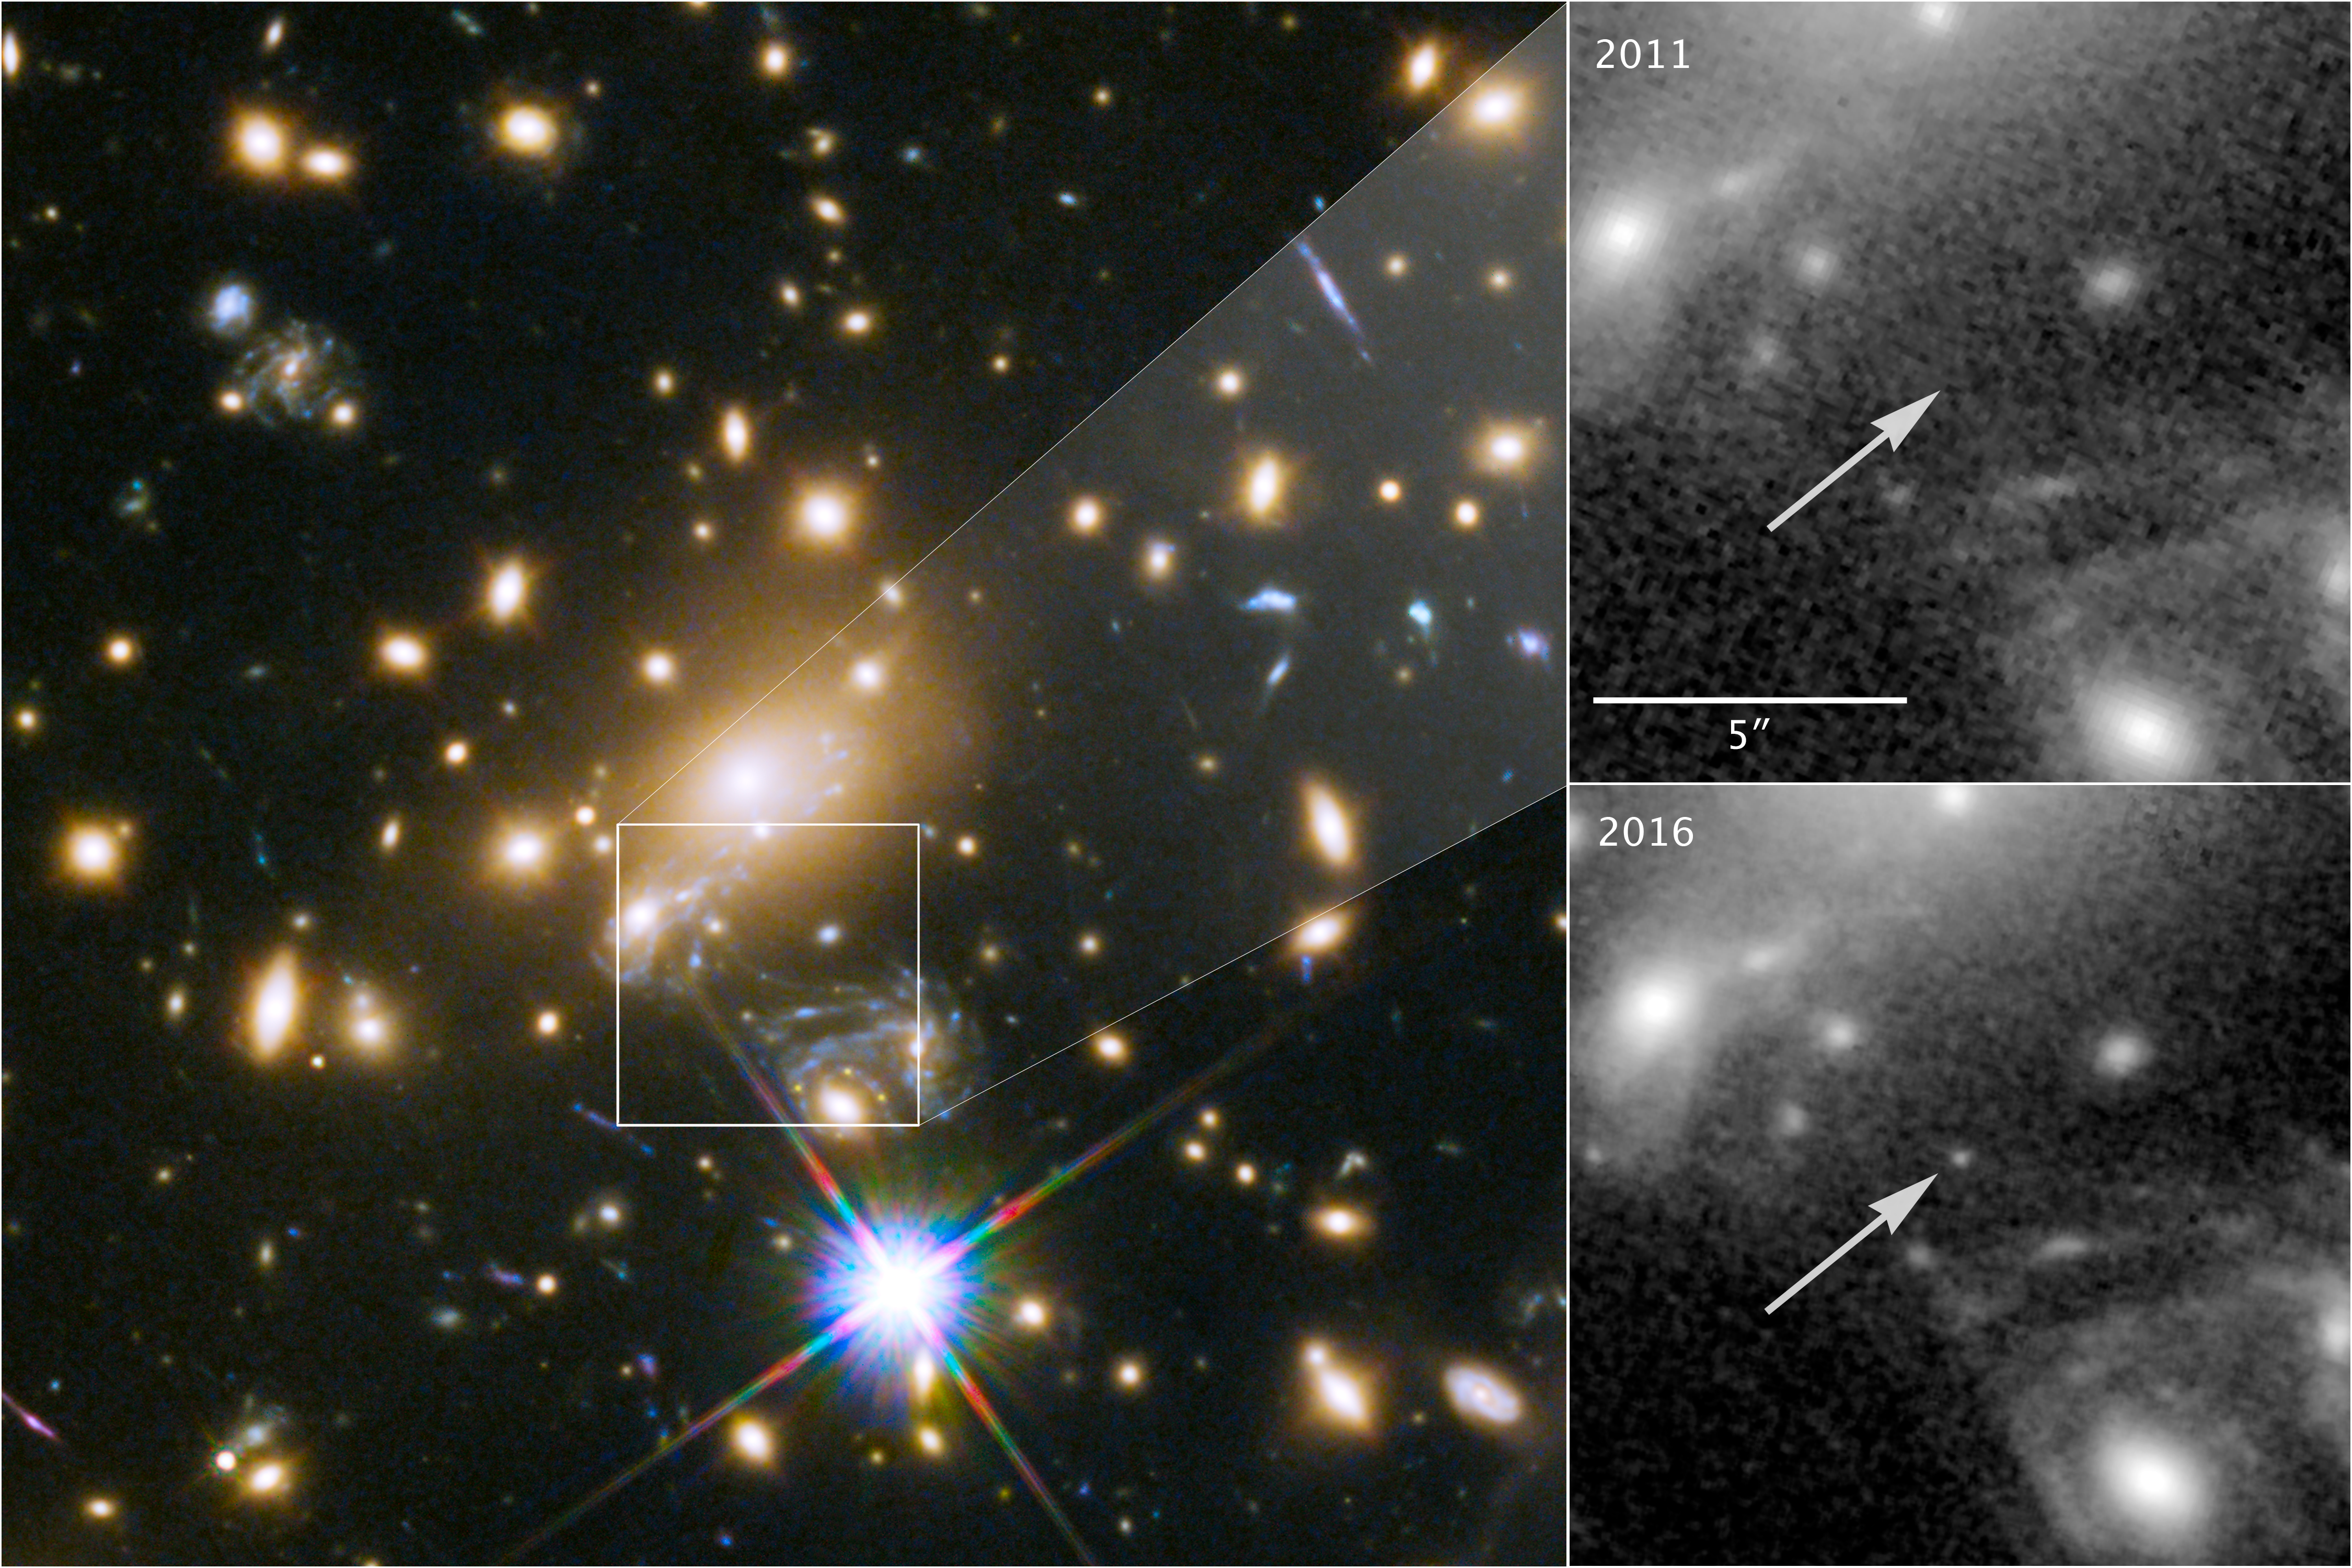

Appearance of the most distant star

This image composite shows the discovery of the most distant known star using the NASA/ESA Hubble Space Telescope.

The image to the left shows a part of the the deep-field observation of the galaxy cluster MACS J1149.5+2223 from the Frontier Fields programme gathered in 2014. The square indicates the position where the star appeared in May 2016 — its image magnified by gravitational microlensing. This part of the image also shows the four images of the Refsdal supernova, arranged in an Einstein cross.

The upper right image pinpoints the position of the star, observed in 2011.

The lower right image shows where the star was undergoing the microlensing event in late May 2016.

Credit: NASA & ESA and P. Kelly (University of California, Berkeley)